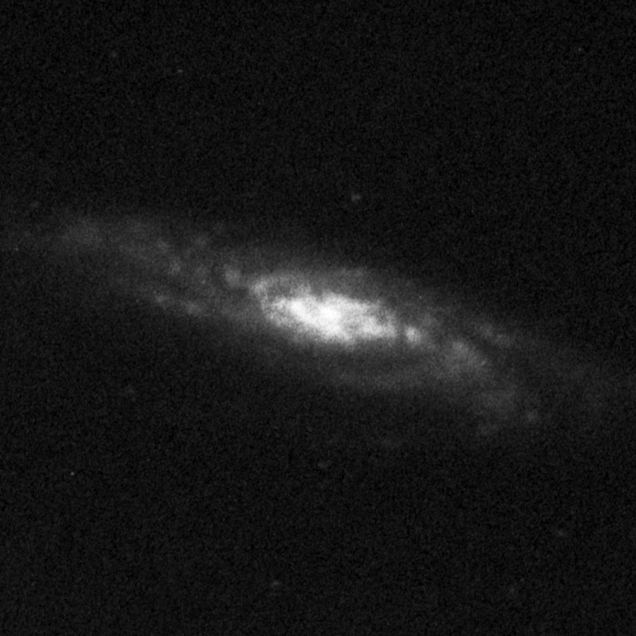

Central Bulges of Spiral Galaxies - NGC 7537 (Ground-Based View)

This ground based image represents a complete view of the spiral galaxy NGC 7537.

Credit: Allan Sandage (The Observatories of the Carnegie Institution of Washington) and John Bedke (Computer Sciences Corporation and the Space Telescope Science Institute)